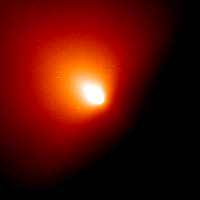

Comet Linear (July 6, 2000)

The nucleus cannot be seen in these images because it is about a mile or so across, which is too small for the Hubble telescope to see.

Credit: NASA/ESA, H. Weaver and P. Feldman (Johns Hopkins University), M. A'Hearn (University of Maryland), C. Arpigny (Liège University), M. Combi (University of Michigan), M. Festou (Observatoire Midi-Pyrénées), and G.-P. Tozzi (Arcetri Observatory)